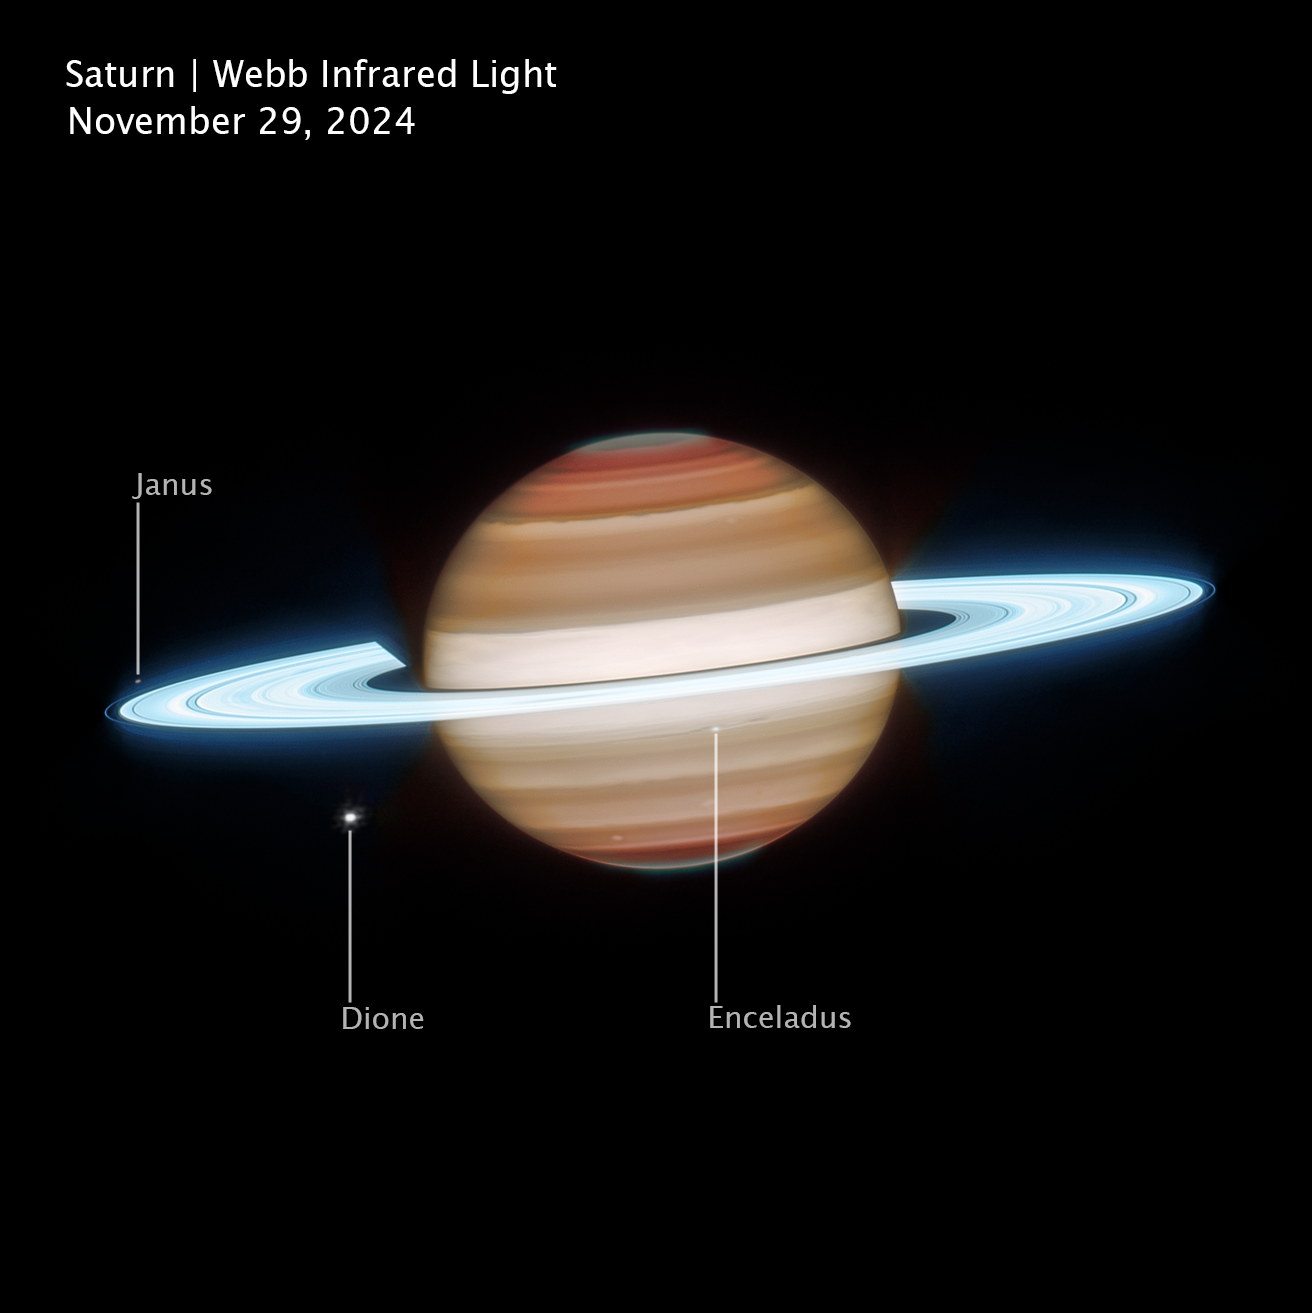

Saturn (Webb image, cropped and annotated)

This infrared view of Saturn was captured on 29 November 2024, by the NASA/ESA/CSA James Webb Space Telescope. Observing the planet in infrared wavelengths allows Webb to reveal details of Saturn’s atmosphere and rings that can’t be seen in visible light. In this view, Saturn’s rings appear exceptionally bright because they are composed largely of highly reflective water-ice particles that efficiently scatter sunlight.

Infrared observations also highlight structure in Saturn’s atmosphere, including broad cloud bands and subtle variations caused by temperature differences, winds, and high-altitude hazes. Webb’s sensitivity to infrared light allows scientists to probe different layers of the atmosphere, helping researchers study how gases, clouds, and aerosols interact across multiple altitudes. These observations provide new insight into the planet’s complex weather patterns and atmospheric dynamics.

Several of Saturn’s moons are visible in this image. Janus appears near the rings to the left of the planet, while Dione is visible below as a bright point of light. Close to the centre of the image, Enceladus appears near the rings. Enceladus is of particular scientific interest because it harbors a global subsurface ocean beneath its icy crust and ejects plumes of water vapor and ice grains into space from fractures near its south pole.

Credit: NASA, ESA, CSA, STScI; Image Processing: J. DePasquale (STScI)